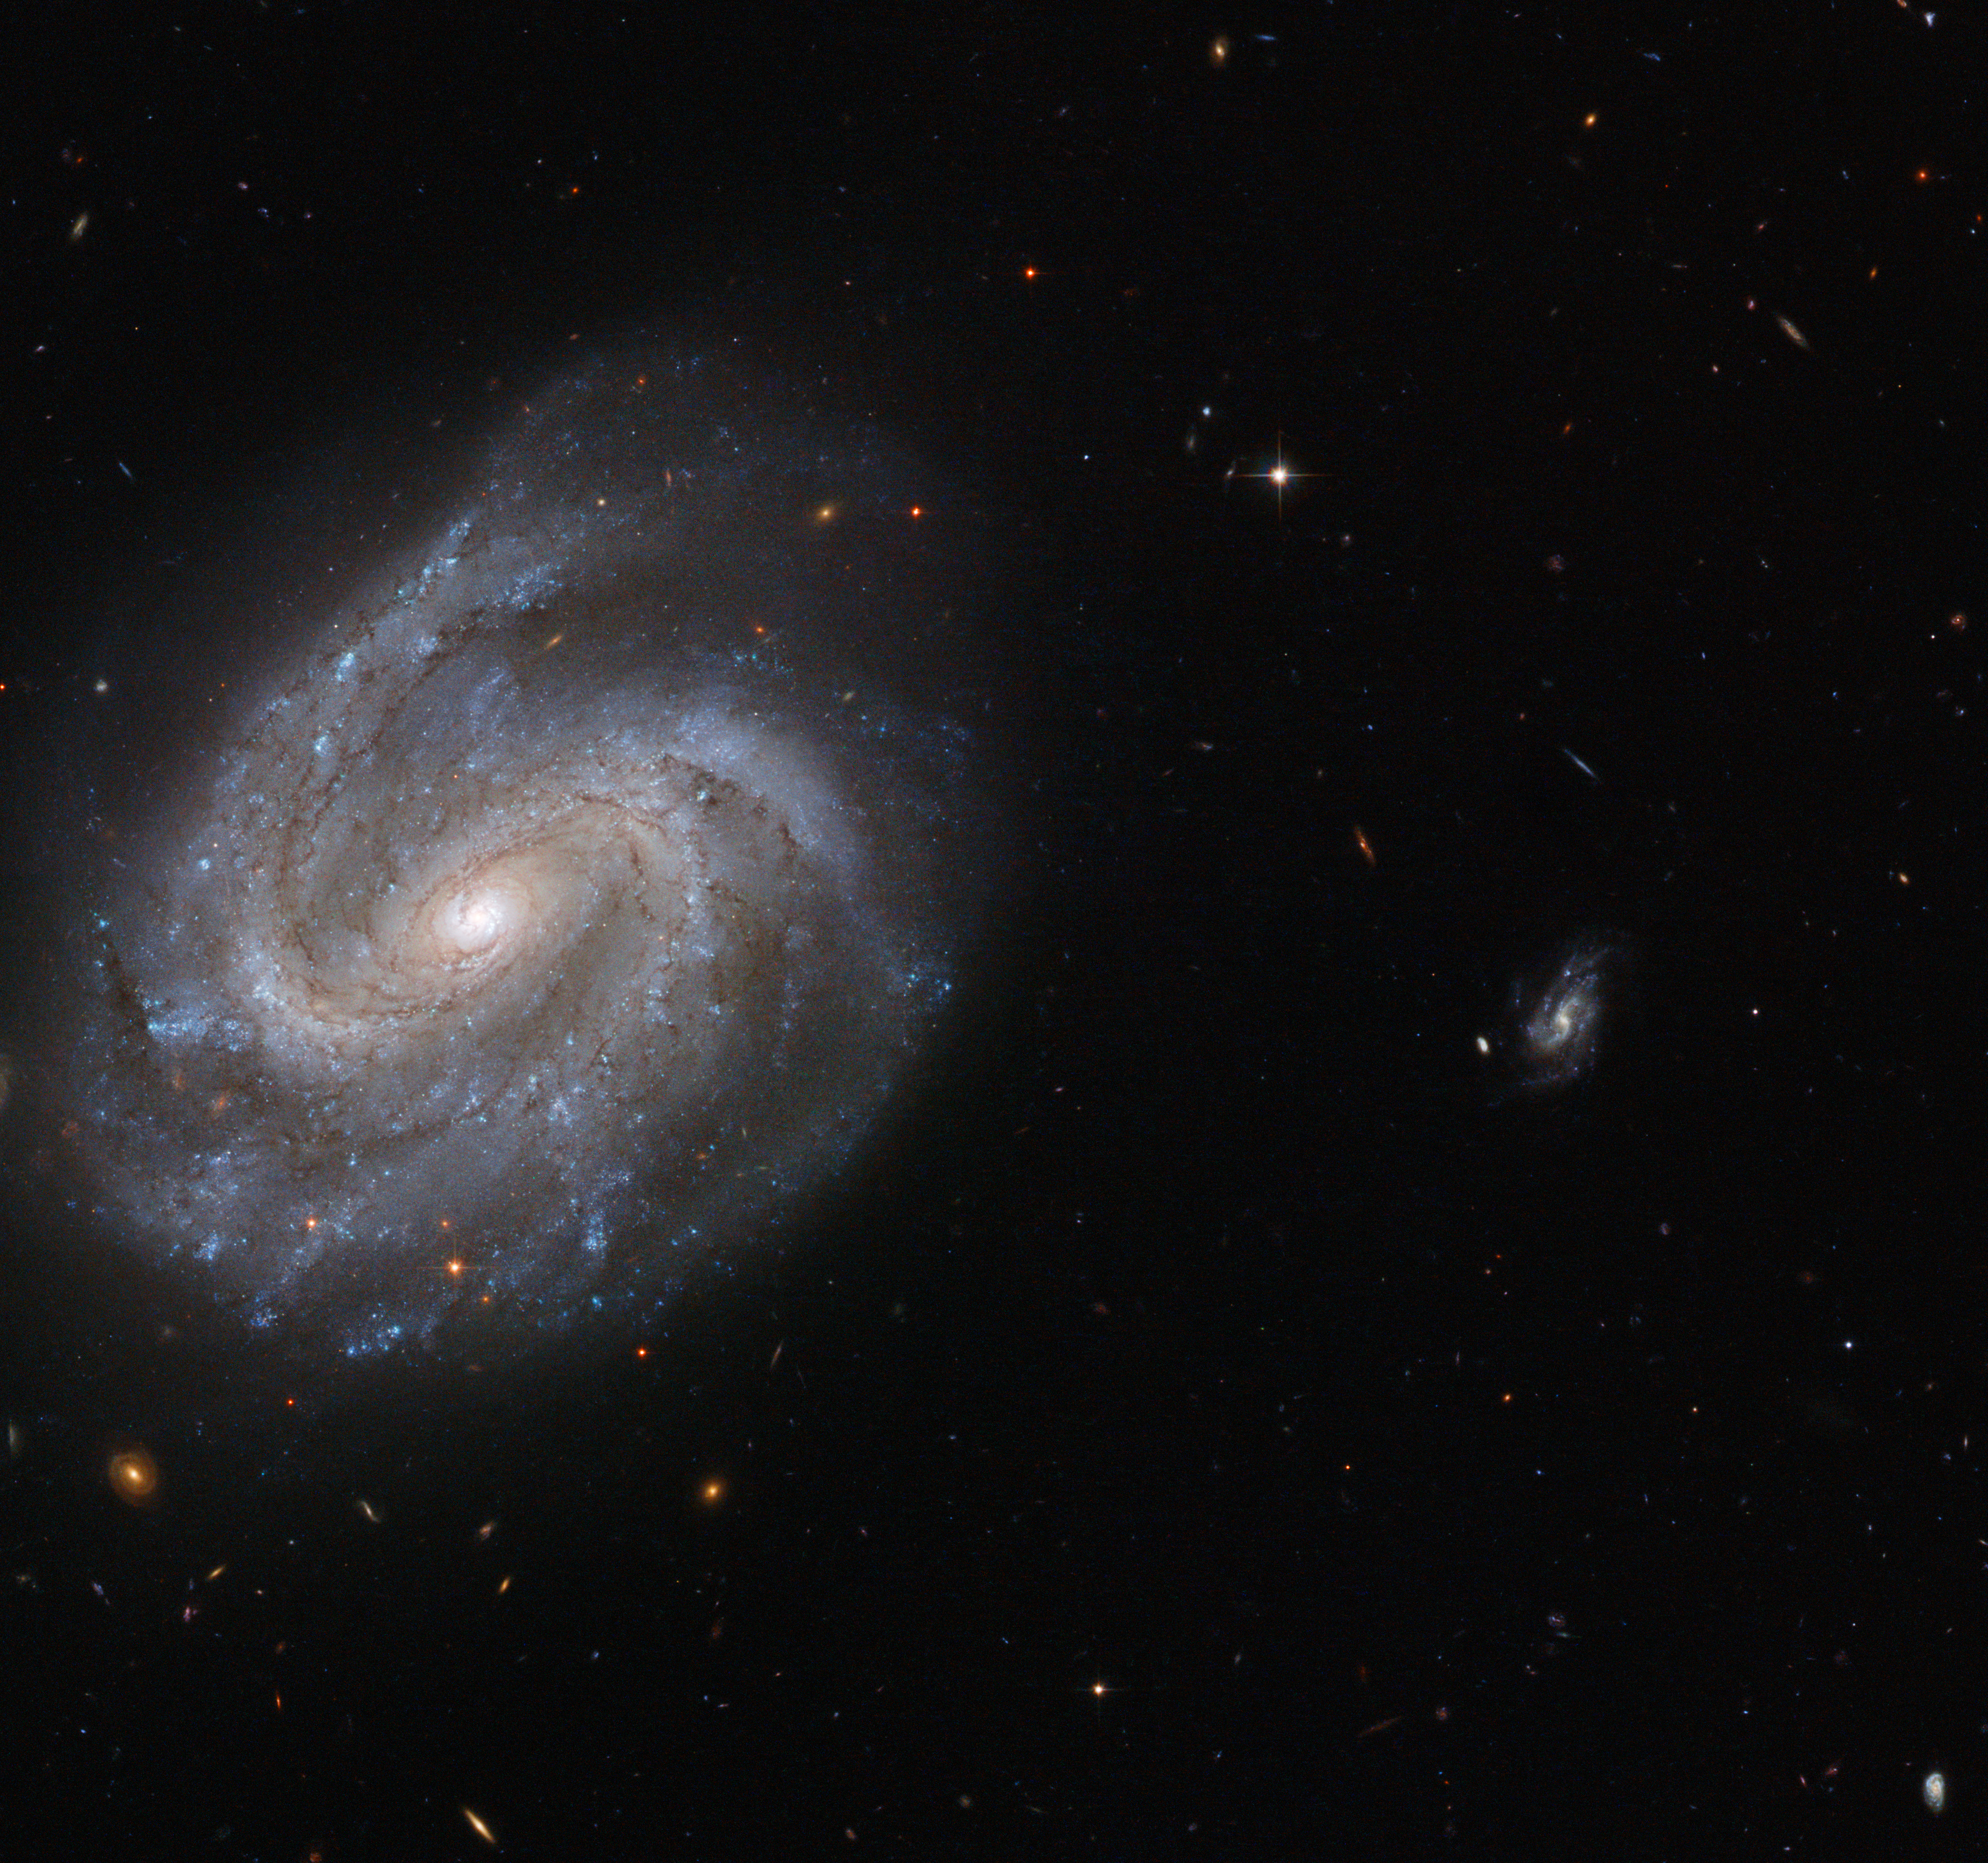

A fossil in the making

Discovered by astronomer William Herschel in the late 1700s, NGC 201 is a barred spiral galaxy similar to our own galaxy, the Milky Way. It lies 200 million light-years from Earth in the constellation of Cetus (The Sea Monster), and is invisible to the naked eye.

This new NASA/ESA Hubble Space Telescope image of NGC 201 shows the galaxy in striking detail, capturing the bright centre and the barred spiral arms — arms that do not start directly from the galactic centre, but instead seem to be offset and stem from a "bar" of stars cutting through the middle of the galaxy.

Along with three of its closest galactic neighbours (outside the frame), NGC 201 belongs to a group known as the HCG 7 compact galactic group. Hickson Compact Groups (HCG) are relatively small and isolated systems containing a handful of bright, compact galaxies that lie close to one another. As the galaxies within these groups move closer together they interact strongly, dragging galactic material out into space and distorting the structure of the other group members.

Eventually, all the galaxies within one HCG will merge together. Simulations have shown that within a billion years, the galaxies within one HCG have merged to form a giant fossil galaxy. It is possible that this is the final fate of all galactic groups.

A version of this image was submitted to the Hubble's Hidden Treasures image processing competition by contestant Luca Limatola.

Credit: ESA/Hubble & NASA Acknowledgement: Luca Limatola